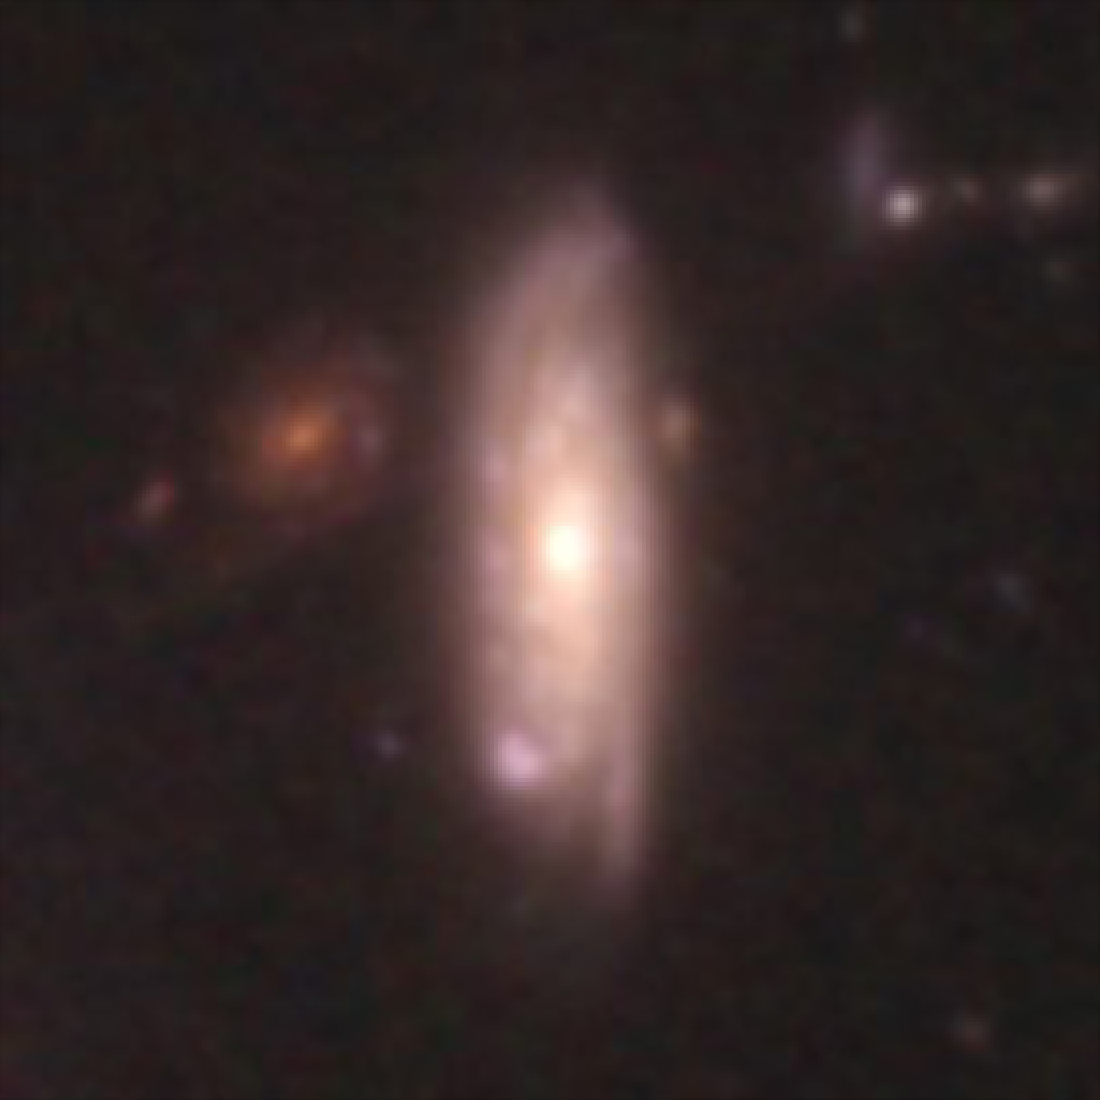

Hubble galaxy at redshift z = 0.26

This image, taken by the NASA/ESA Hubble Space Telescope, shows a galaxy similar in mass to the Milky Way. The galaxy is seen as it was 3.1 billion years ago.

Credit: NASA, ESA, C. Papovich (Texas A&M University), H. Ferguson (STScI), S. Faber (University of California, Santa Cruz), and I. Labbé (Leiden University)